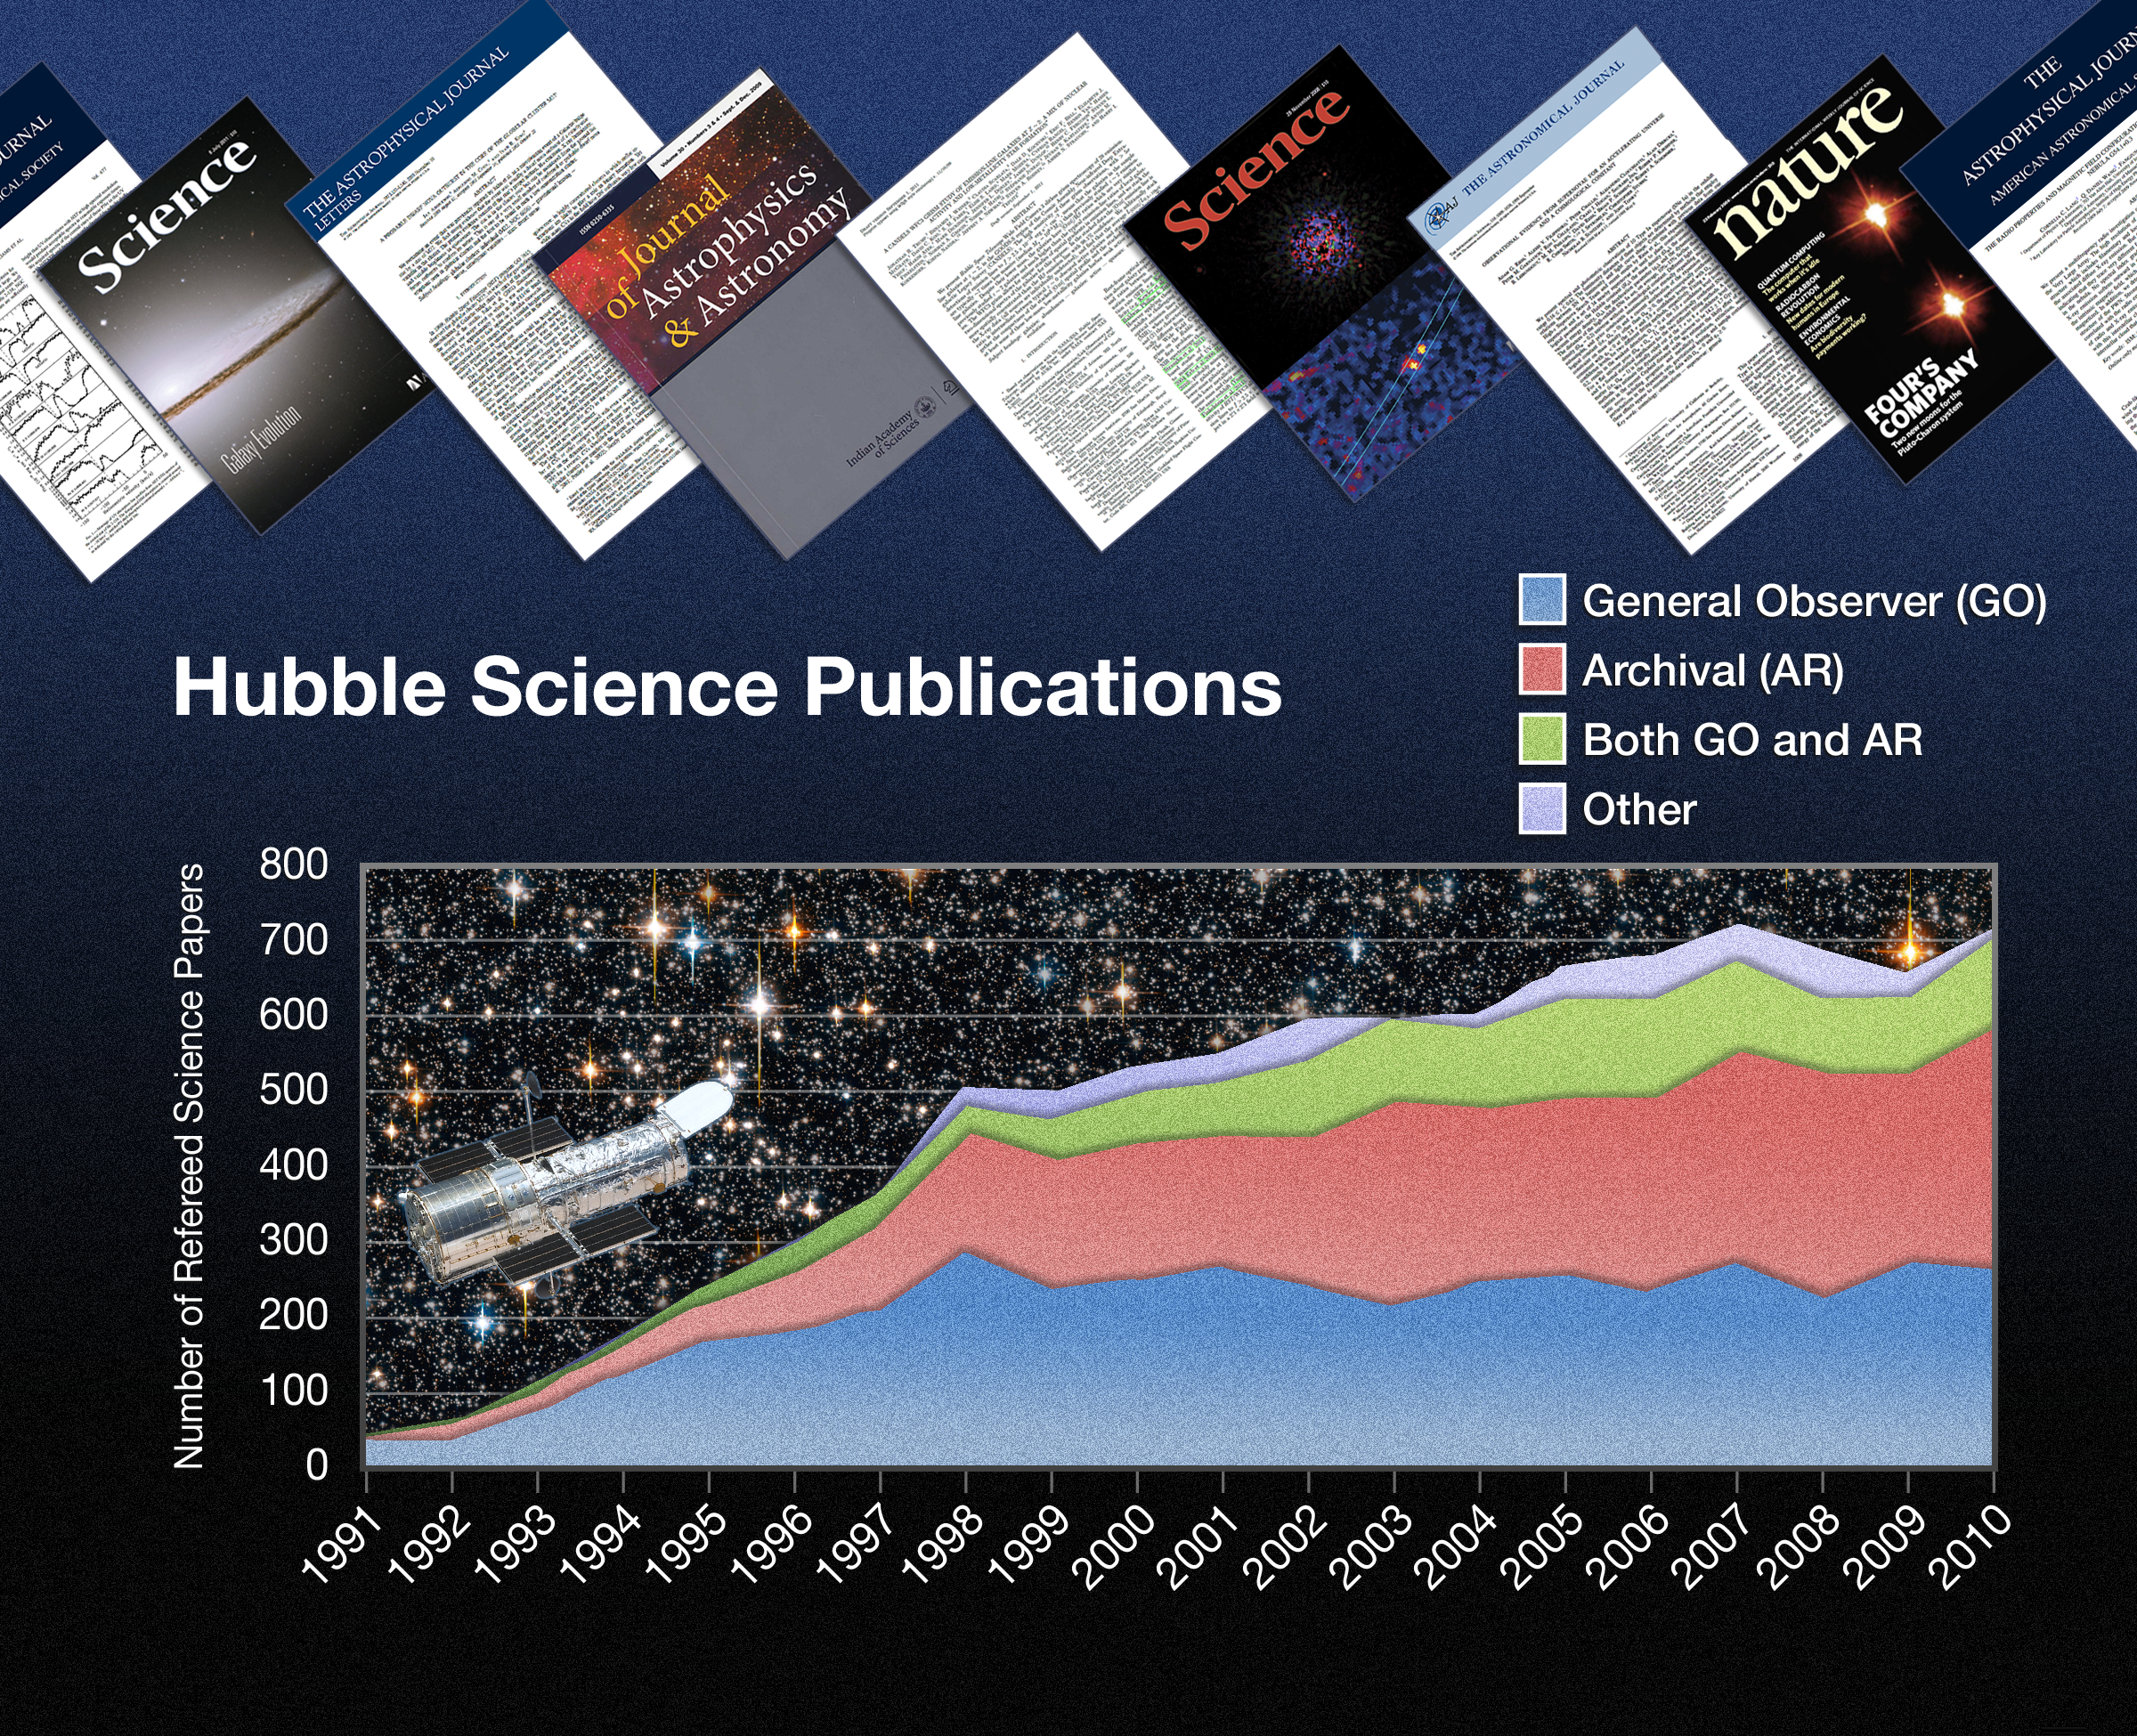

Hubble papers published over the years

This graph shows how the number of published scientific papers based on Hubble data has risen over the years. Hubble is a valuable tool for astronomers, not only for carrying out new observations, but also because of its huge archive of publicly available data from previous years of observations.

This graph shows how the number of papers published every year using new data (“general observer” or “GO”) and archival data (“AR”) a combination (“Both GO and AR”) has varied over the years. As Hubble’s library of observations has grown, its importance as a scientific resource has increased, meaning archival observations now contribute to a majority of Hubble papers.

Hubble’s 10 000th paper has just been published.

Credit: NASA, ESA